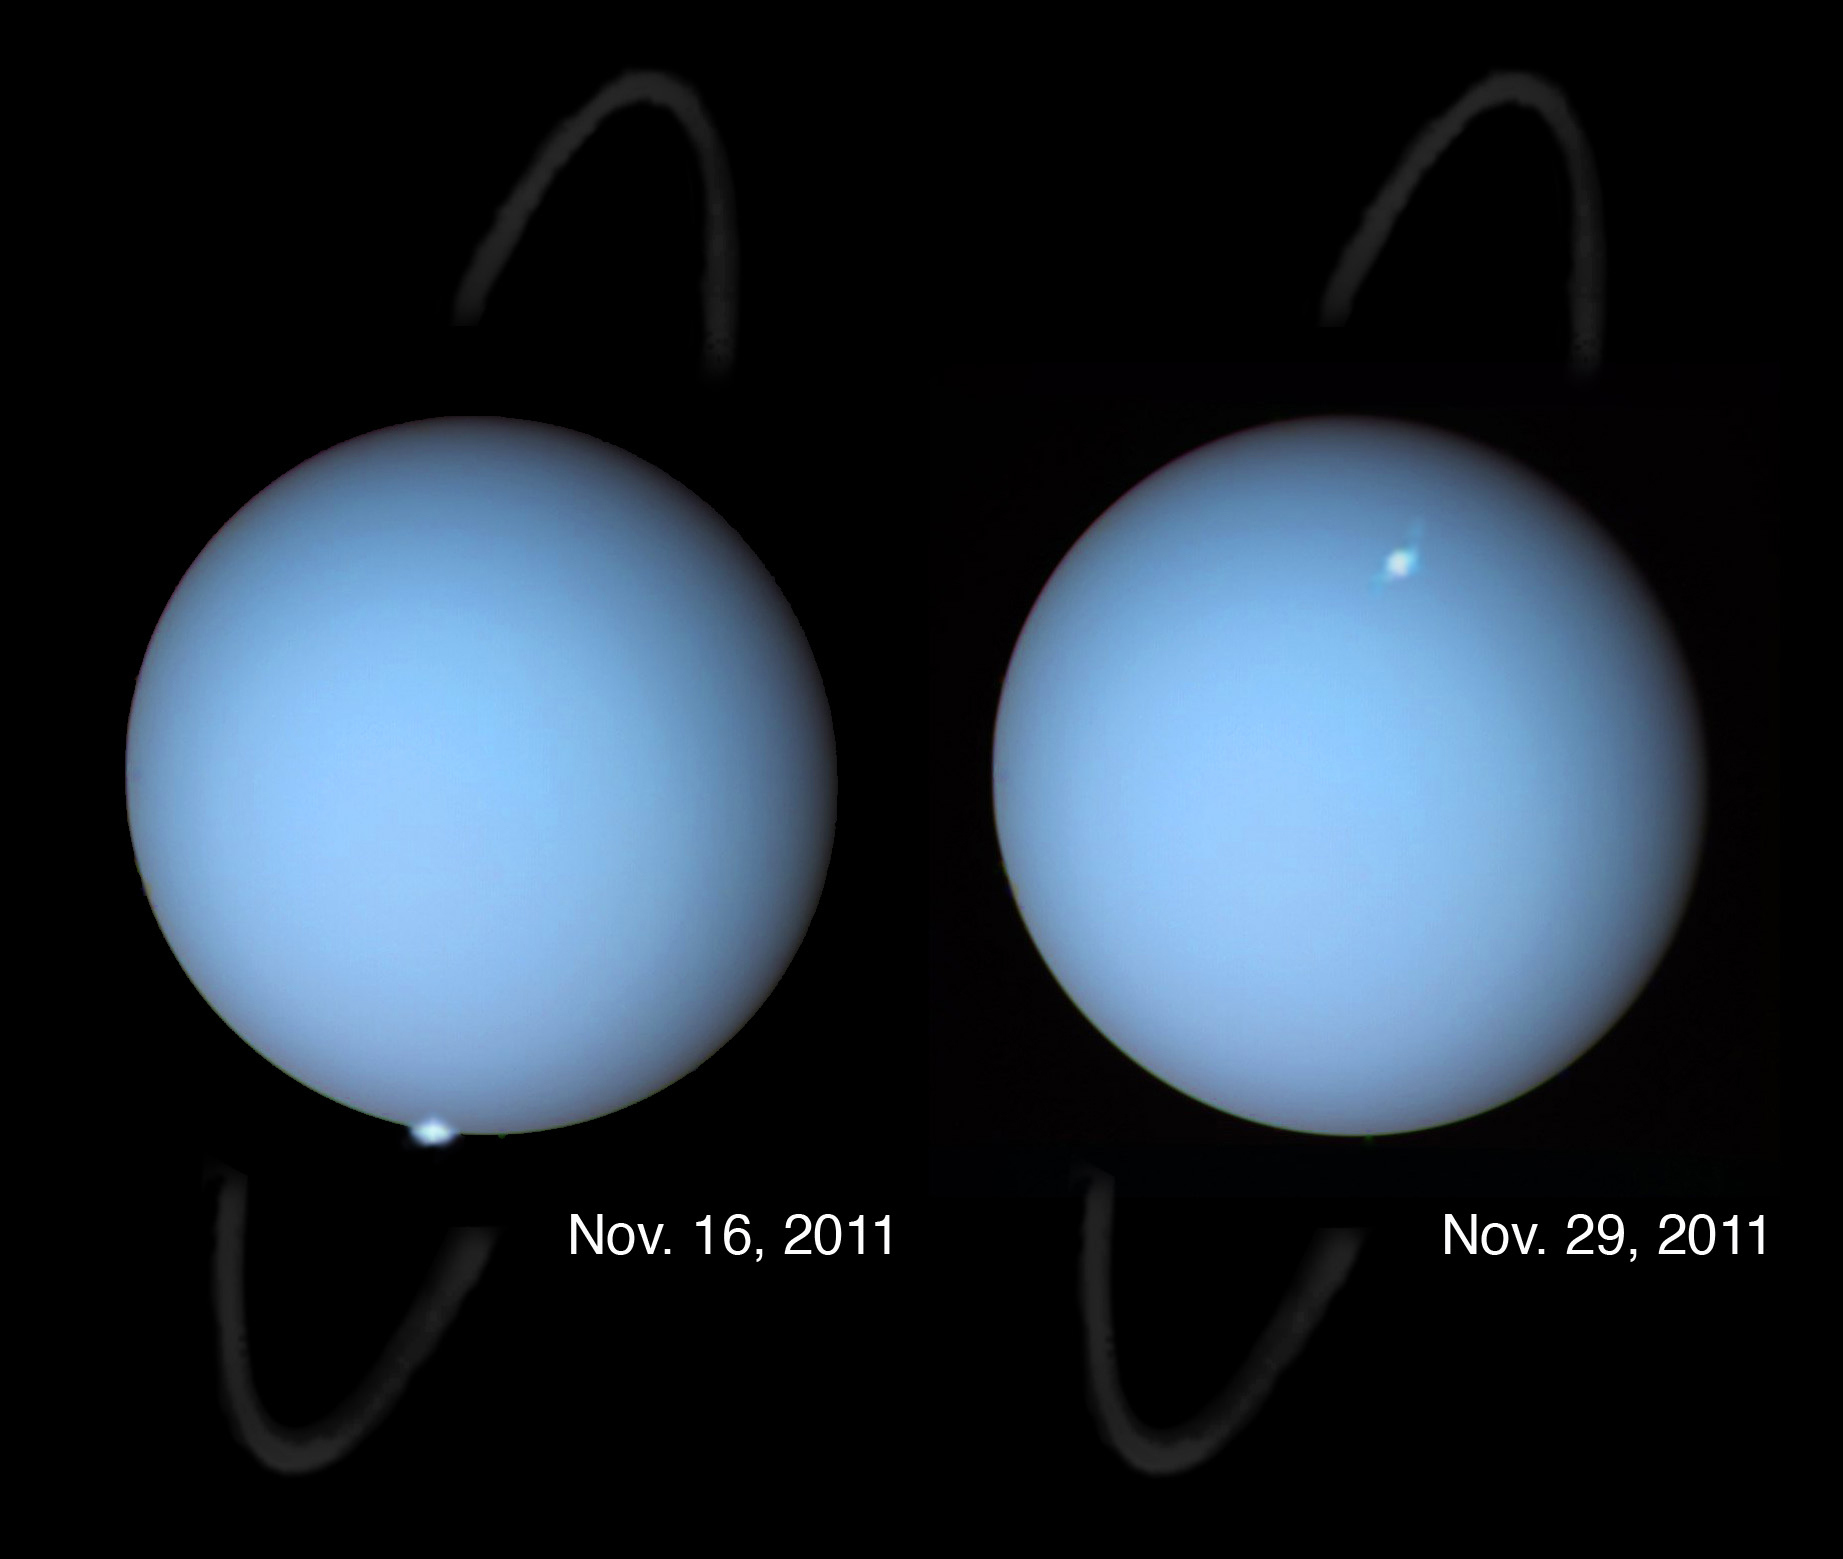

Hubble spots aurorae on the planet Uranus

These are among the first clear images, taken from the distance of Earth, to show aurorae on the planet Uranus. Aurorae are produced when high-energy particles from the Sun cascade along magnetic field lines into a planet's upper atmosphere. This causes the planet's atmospheric gasses to fluoresce. The ultraviolet images were taken at the time of heightened solar activity in November 2011 that successively buffeted the Earth, Jupiter, and Uranus with a gusher of charged particles from the Sun. Because Uranus' magnetic field is inclined 59 degrees to its spin axis, the auroral spots appear far from the planet's north and south poles. This composite image combines 2011 Hubble observations of the aurorae in visible and ultraviolet light, 1986 Voyager 2 photos of the cyan disk of Uranus as seen in visible light, and 2011 Gemini Observatory observations of the faint ring system as seen in infrared light.

Credit: NASA, ESA, and L. Lamy (Observatory of Paris, CNRS, CNES)